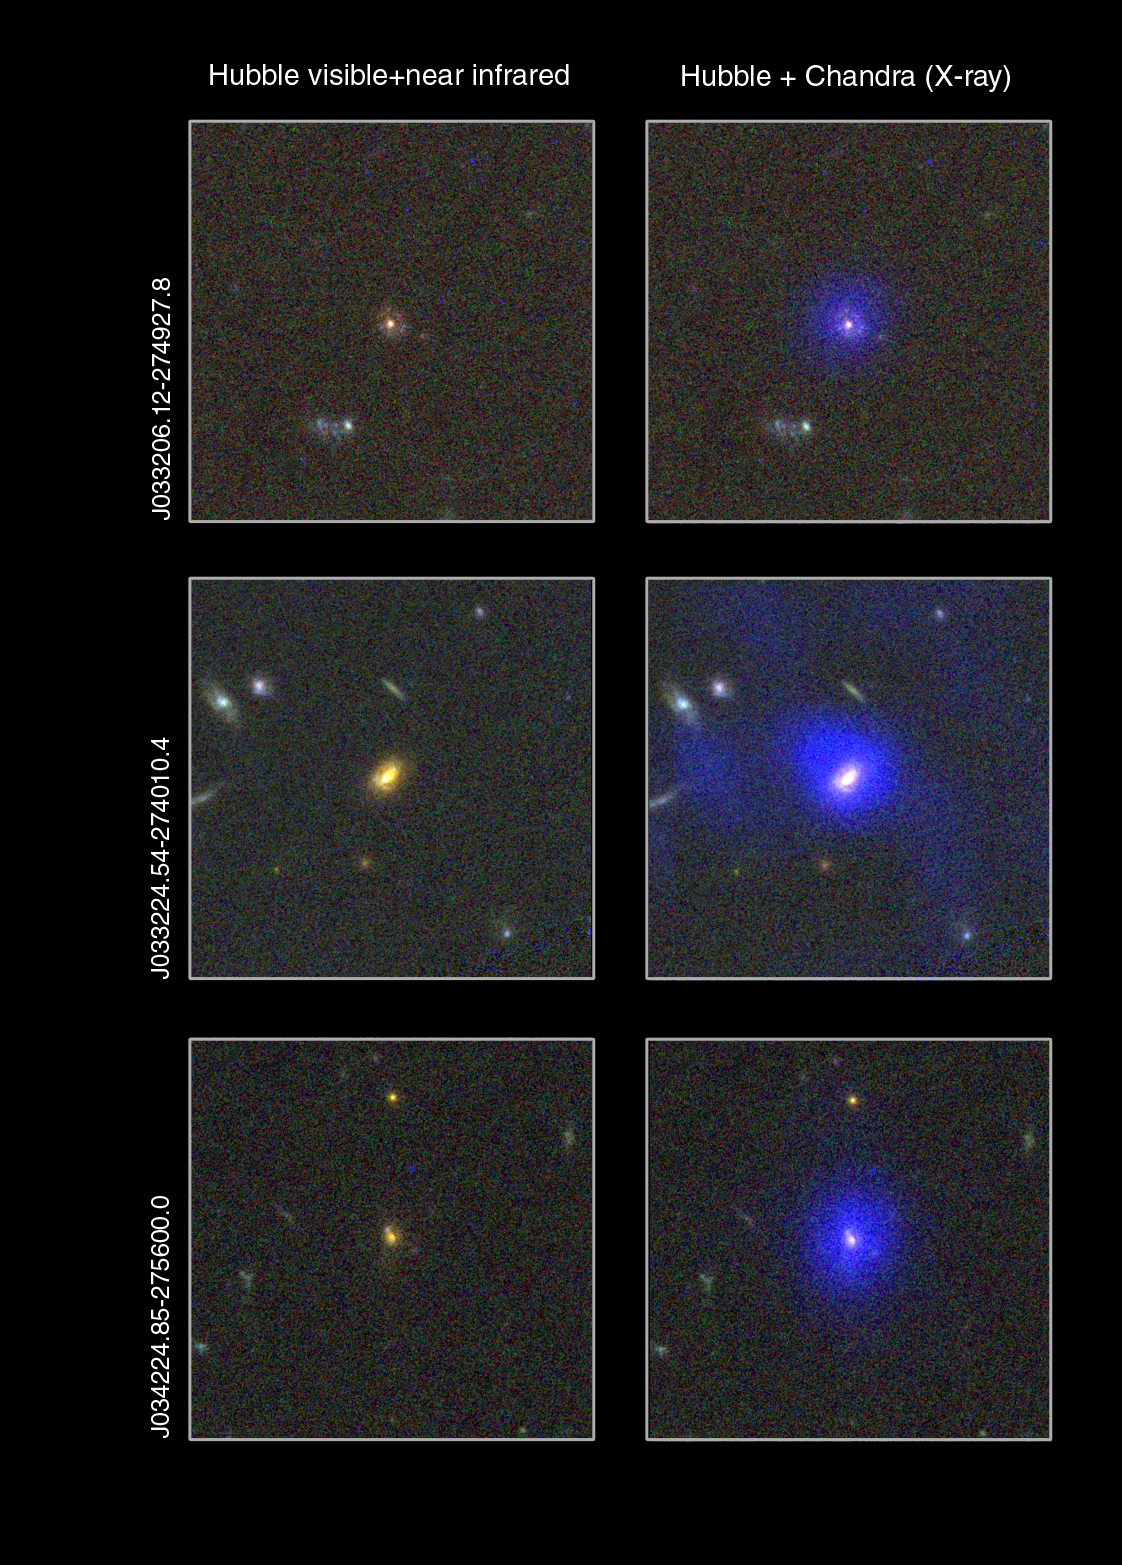

Dust-enshrouded supermassive black holes

Colour-composite images of the host galaxies of three of 30 newly found dust-enshrouded supermassive black holes. To the left images taken with the Advanced Camera for Surveys onboard the NASA/ESA Hubble Space Telescope. To the right these images are overlaid with images (in blue) from NASA's Chandra X-ray Observatory. Note that the actual black holes themselves are not visible in the images, however X-ray radiation can escape from a violently active region very close to the black hole.

Credit: ESA/NASA, the AVO project and Paolo Padovani